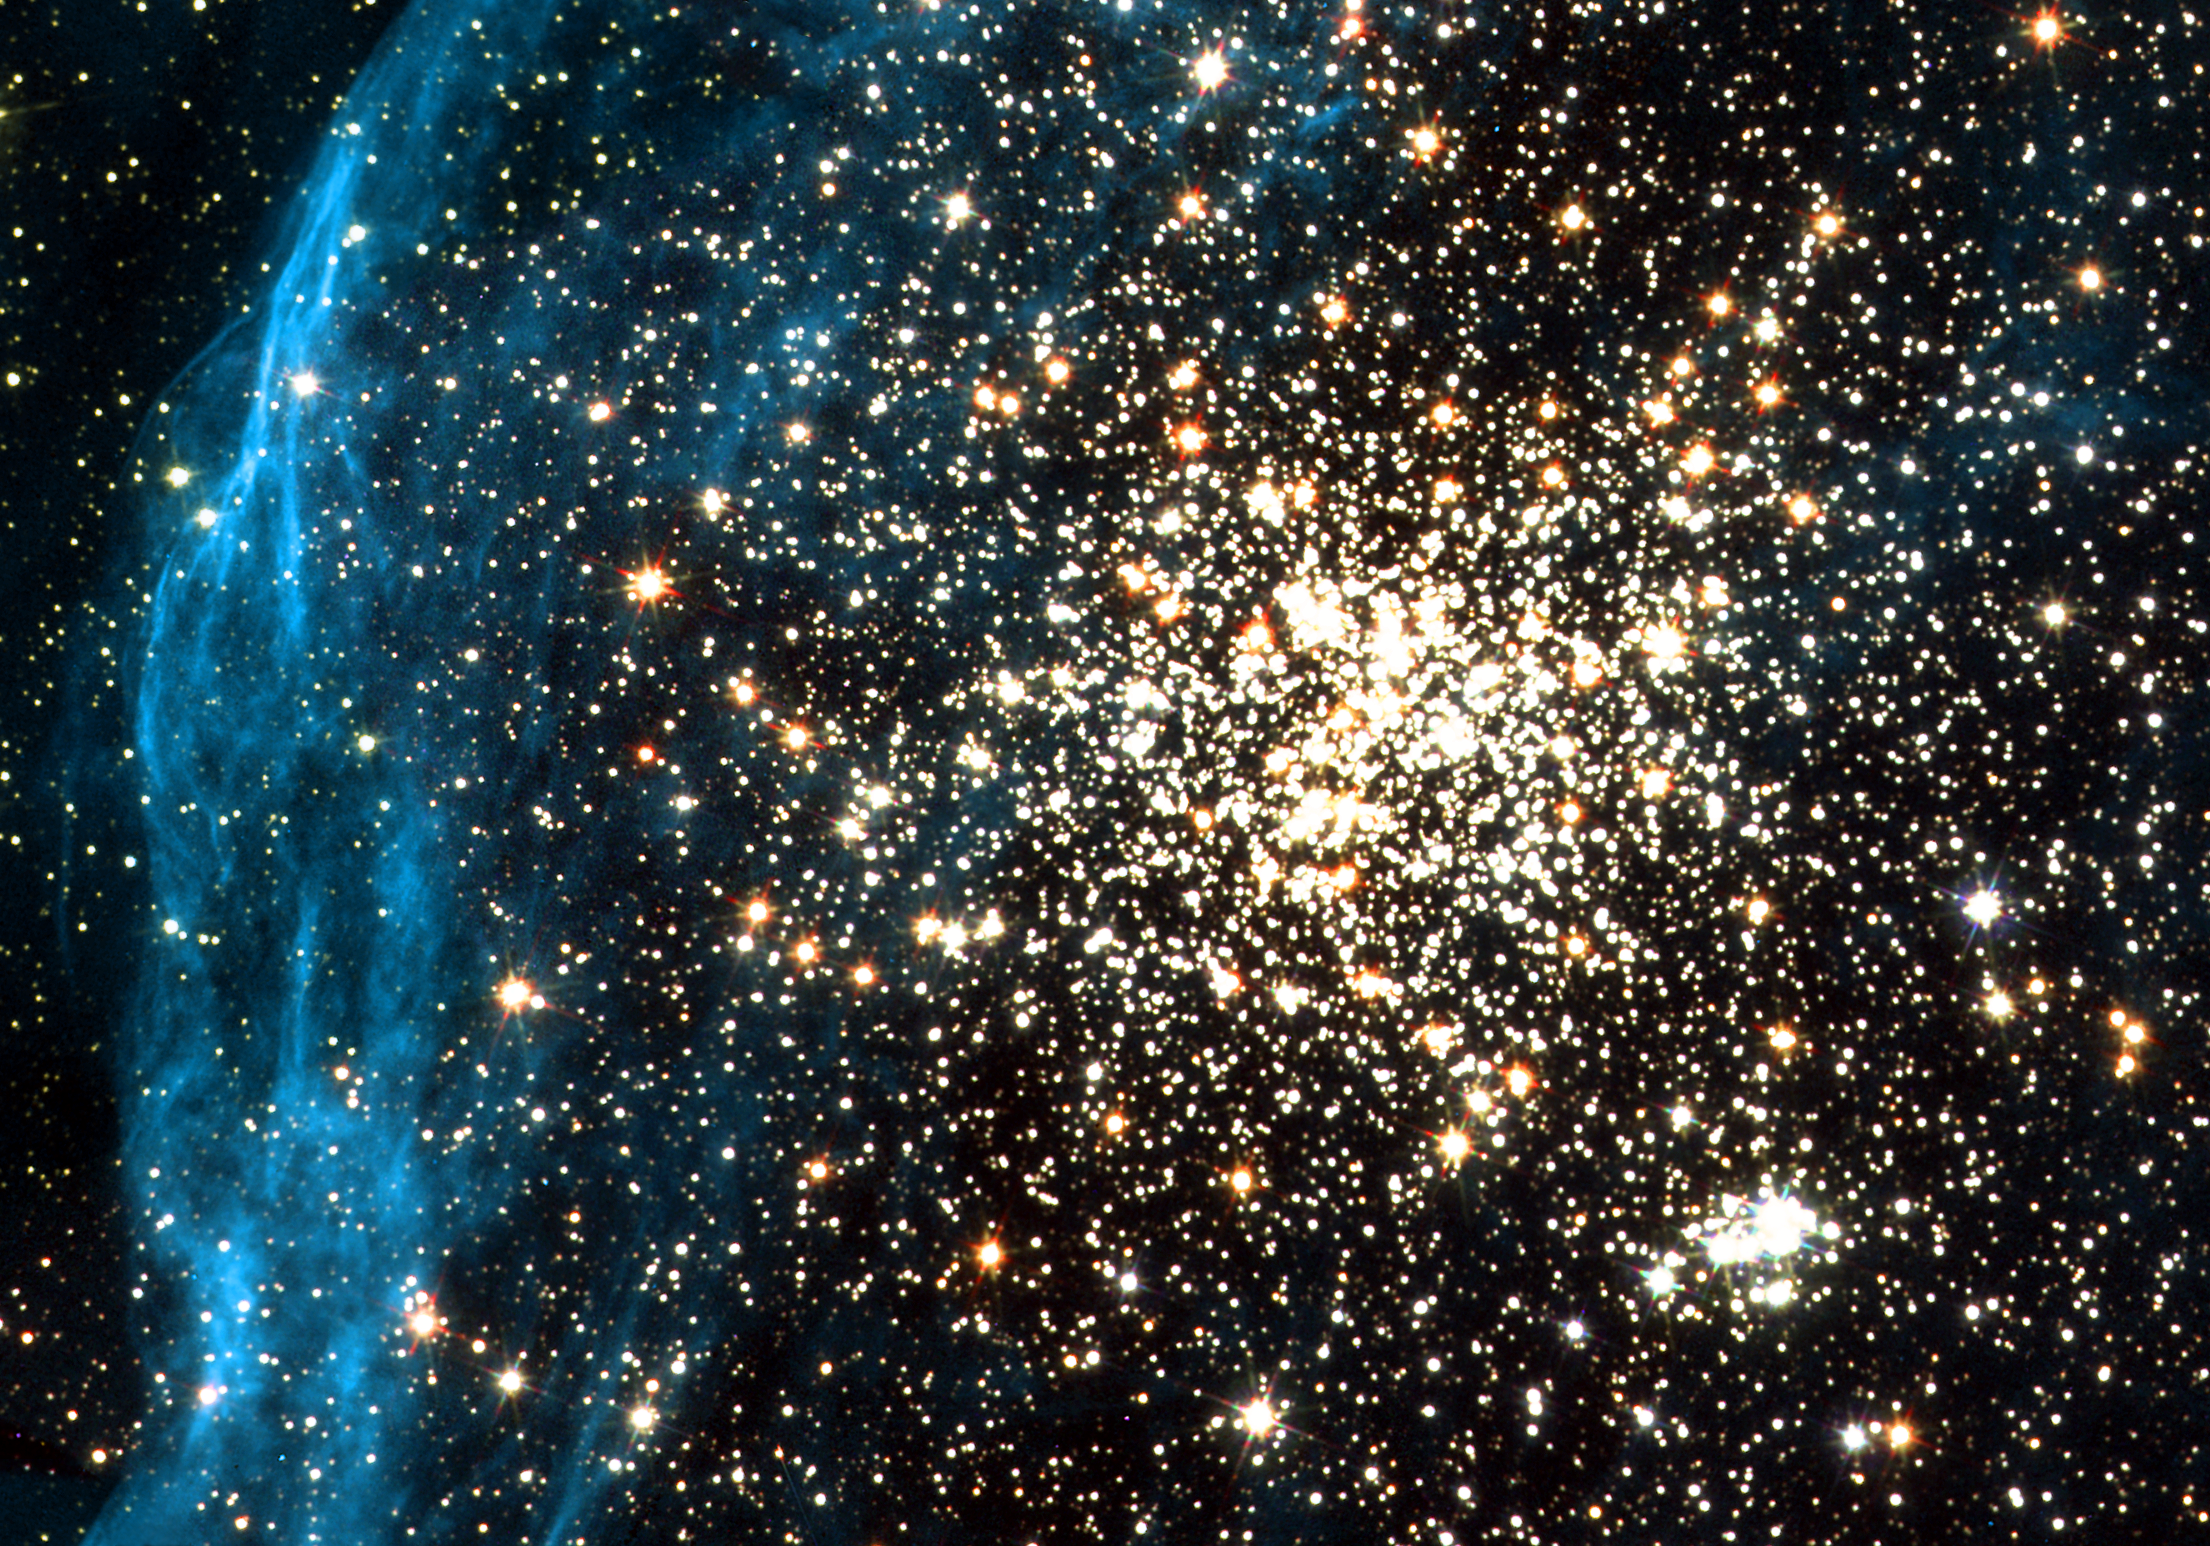

Hubble images remarkable double cluster

Located in the Large Magellanic Cloud, one of our neighbouring dwarf galaxies, this young globular-like star cluster is surrounded by a pattern of filamentary nebulosity that is thought to have been created during supernova blasts. It consists of a main globular cluster in the centre and a younger, smaller cluster, seen below and to the right, composed of extremely hot, blue stars and fainter, red T-Tauri stars. This wide variety of stars allows a thorough study of star formation processes.

Credit: ESA, NASA and Martino Romaniello (European Southern Observatory, Germany)